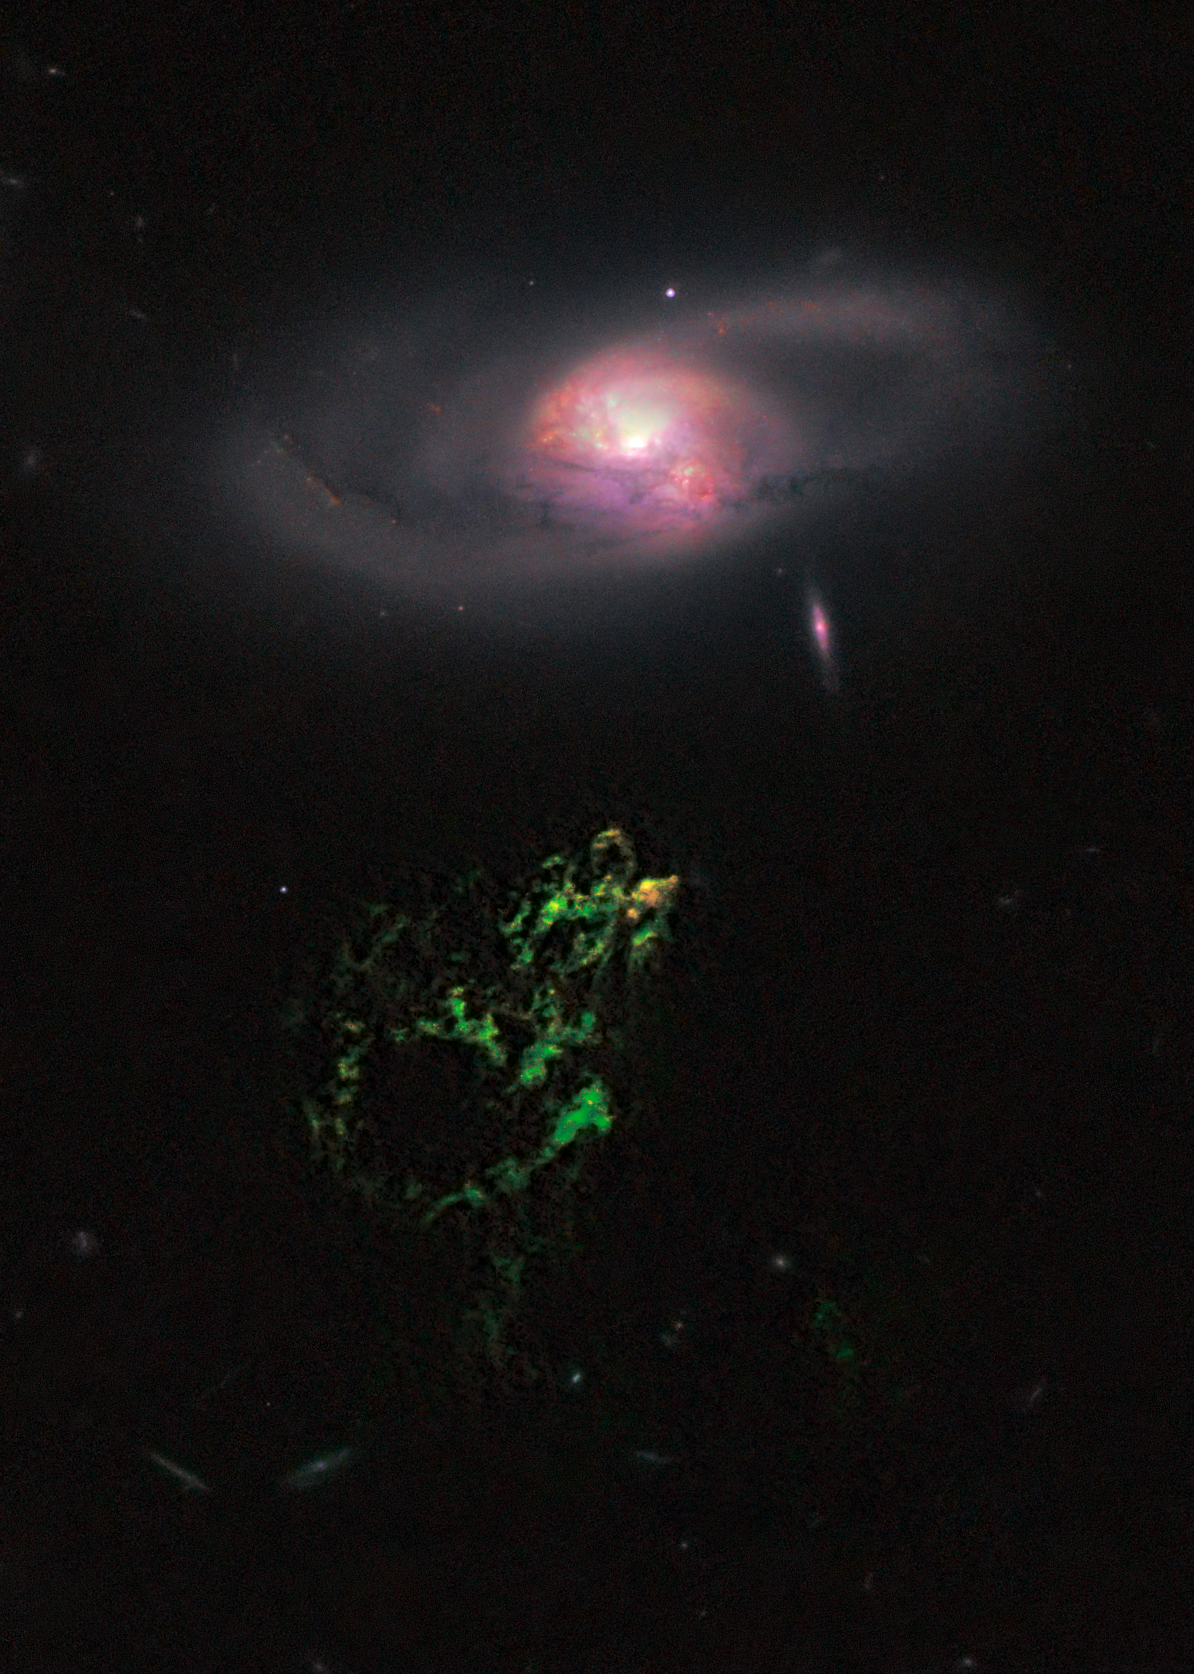

Hubble snaps image of space oddity

In this image by the NASA/ESA Hubble Space Telescope, an unusual, ghostly green blob of gas appears to float near a normal-looking spiral galaxy.

The bizarre object, dubbed Hanny’s Voorwerp (Hanny’s Object in Dutch), is the only visible part of a streamer of gas stretching 300 000 light-years around the galaxy, called IC 2497. The greenish Voorwerp is visible because a searchlight beam of light from the galaxy’s core has illuminated it. This beam came from a quasar, a bright, energetic object that is powered by a black hole. The quasar may have turned off in the last 200 000 years.

This Hubble view uncovers a pocket of star clusters, the yellowish-orange area at the tip of Hanny’s Voorwerp. The star clusters are confined to an area that is a few thousand light-years wide. The youngest stars are a couple of million years old. The Voorwerp is the size of the Milky Way, and its bright green colour is from glowing oxygen.

The image was made by combining data from the Advanced Camera for Surveys (ACS) and the Wide Field Camera 3 (WFC3) onboard Hubble, with data from the WIYN telescope at Kitt Peak, Arizona, USA. The ACS exposures were taken 12 April 2010; the WFC3 data, 4 April 2010.

Credit: NASA, ESA, William Keel (University of Alabama, Tuscaloosa), and the Galaxy Zoo team